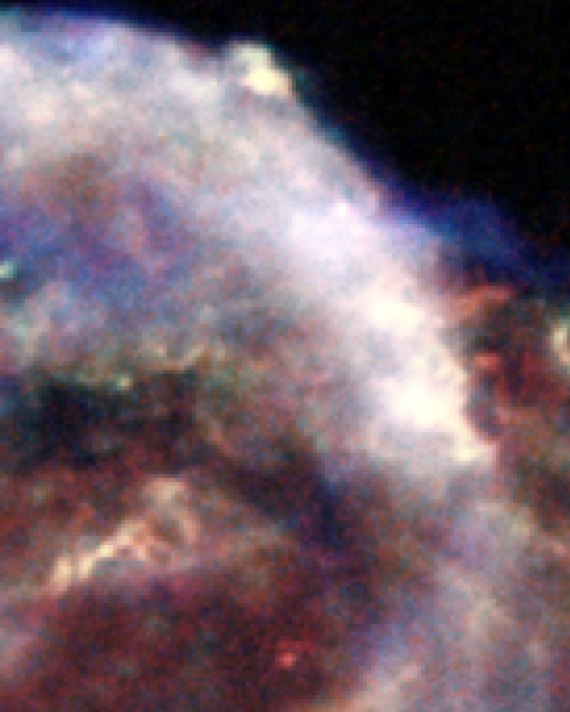

Chandra X-ray Observatory: Kepler's Supernova Remnant (close-up, X-ray data)

This image shows a section of the remains of Kepler's Supernova, the most recent exploding star to be seen in the Milky Way Galaxy. It was first observed 400 years ago when it was thought to be 'a new star'. In fact, it was the the gas and dust from an exploding star, rapidly expanding. These remnants have now reached a diameter of 14 light years wide and are still expanding at 4 million miles per hour.

This image was taken by the Chandra X-ray Observatory.

Credit: NASA, CXC and S. Holt (F.W. Olin College of Engineering)